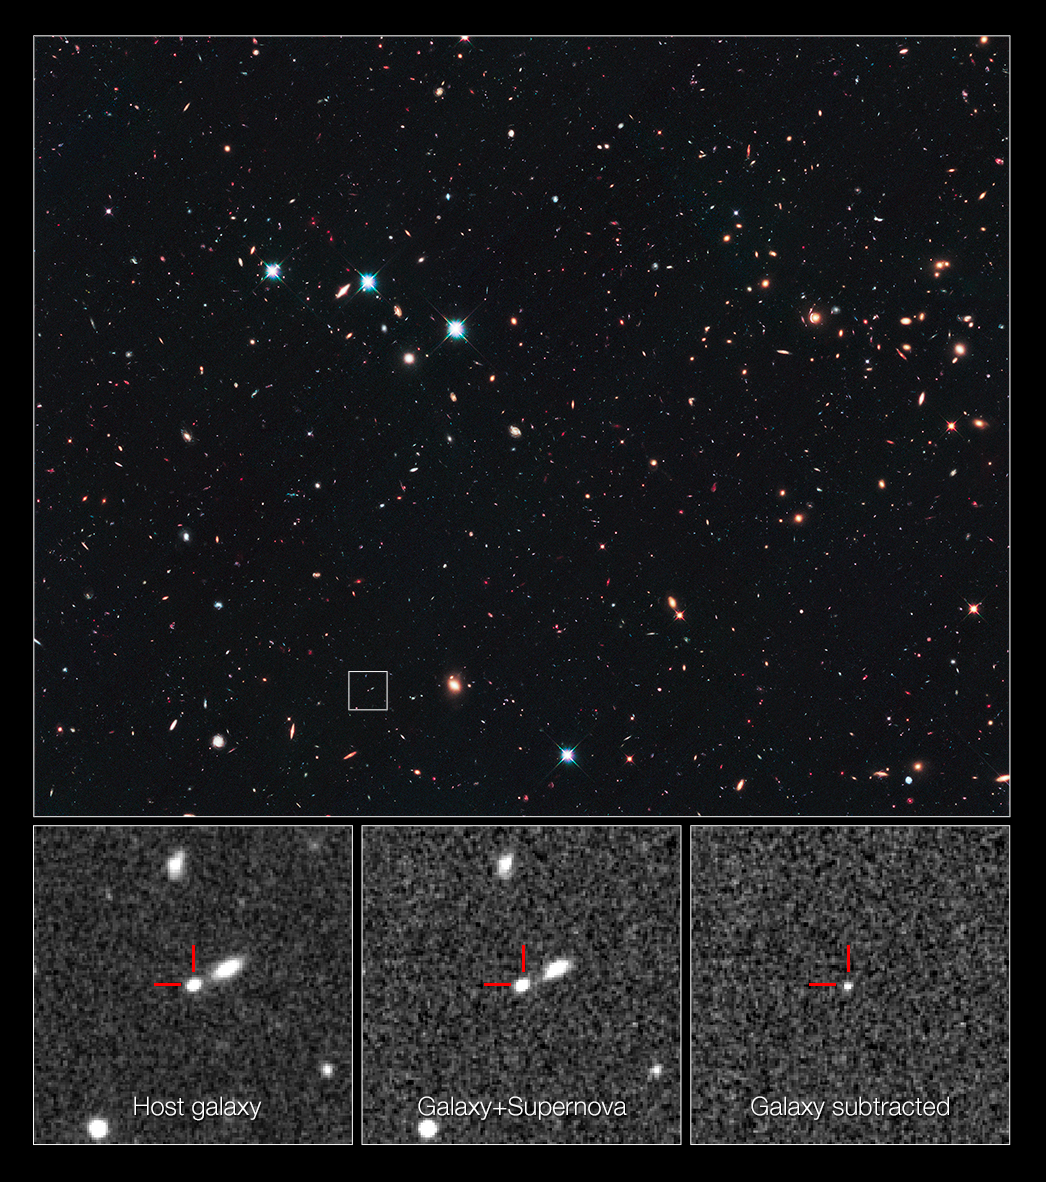

Record-breaking supernova in the CANDELS Ultra Deep Survey

This is a NASA/ESA Hubble Space Telescope view looking long ago and far away at a supernova that exploded over 10 billion years ago — the most distant Type Ia supernova ever detected. The supernova’s light is just arriving at Earth, having travelled more than 10 billion light-years (redshift 1.914) across space.

Astronomers spotted the supernova in December 2010 in the Cosmic Assembly Near-infrared Deep Extragalactic Legacy Survey (CANDELS) field, and named it SN UDS10Wil (nicknamed SN Wilson). The small box in the top image pinpoints the supernova’s host galaxy in the CANDELS survey. The image is a blend of visible and near-infrared light, taken by Hubble’s Advanced Camera for Surveys (ACS) and Wide Field Camera 3 (WFC3). The search technique involved taking multiple near-infrared images with WFC3 spaced roughly 50 days apart over the span of three years, looking for a supernova’s faint glow.

The three bottom images, taken in near-infrared light with WFC3, demonstrate how the astronomers found the supernova. The image at the far left shows the host galaxy without the supernova. The middle image, taken a year later, reveals the galaxy with the supernova. The supernova cannot be seen because it is too close to the centre of its host galaxy. To detect the supernova, astronomers subtracted the left image from the middle image to see the light from the supernova alone, shown in the image at far right.

The astronomers then used WFC3’s spectrometer and the European Southern Observatory’s Very Large Telescope to verify the supernova’s distance and to decode its light, finding the unique signature of a Type Ia supernova.

Credit: NASA, ESA, A. Riess (STScI and JHU), and D. Jones and S. Rodney (JHU)